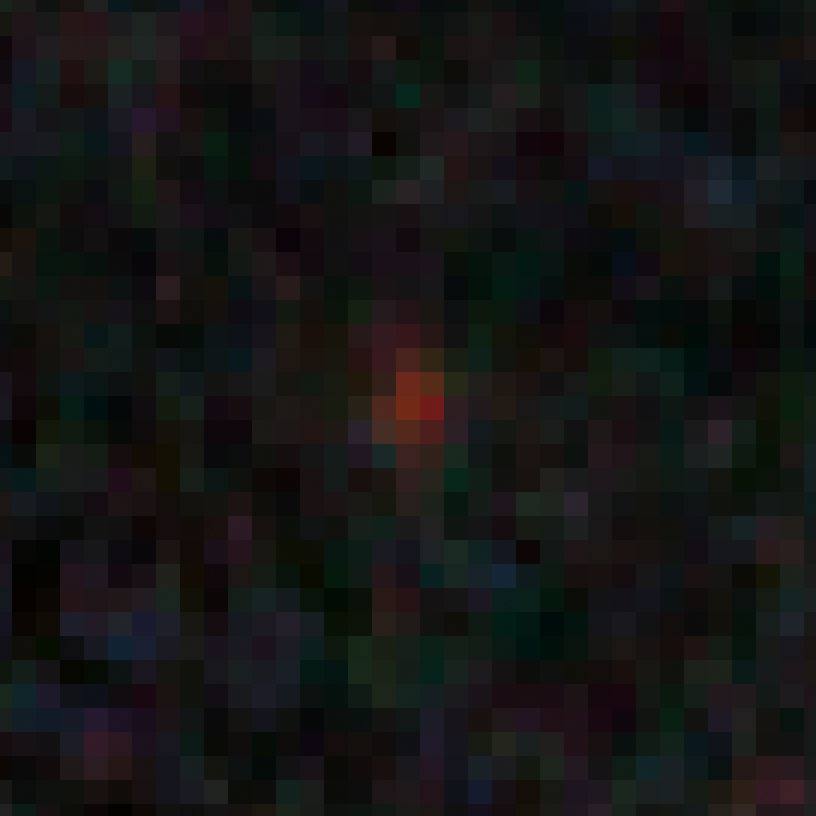

GN-z10-2 in the GOODS-N field

This image shows an ultra-bright young galaxy known as GN-z10-2, discovered in the Hubble GOODS North field (Great Observatories Origins Deep Survey).

Researchers found four unusually red objects, including GN-z10-2, that appear as they existed just 500 million years after the Big Bang. They appear red because their light has been stretched to longer infrared wavelengths by the expansion of the Universe. These extremely compact and bright galaxies present a puzzle to researchers because they are much more luminous than anything previously seen at such an early epoch. The young galaxies are bright because they are forming stars at a much faster rate than for other galaxies found at such early times.

Credit: NASA, ESA, G. Illingworth (University of California, Santa Cruz), P. Oesch (University of California, Santa Cruz; Yale University), R. Bouwens and I. Labbé (Leiden University), and the Science Team